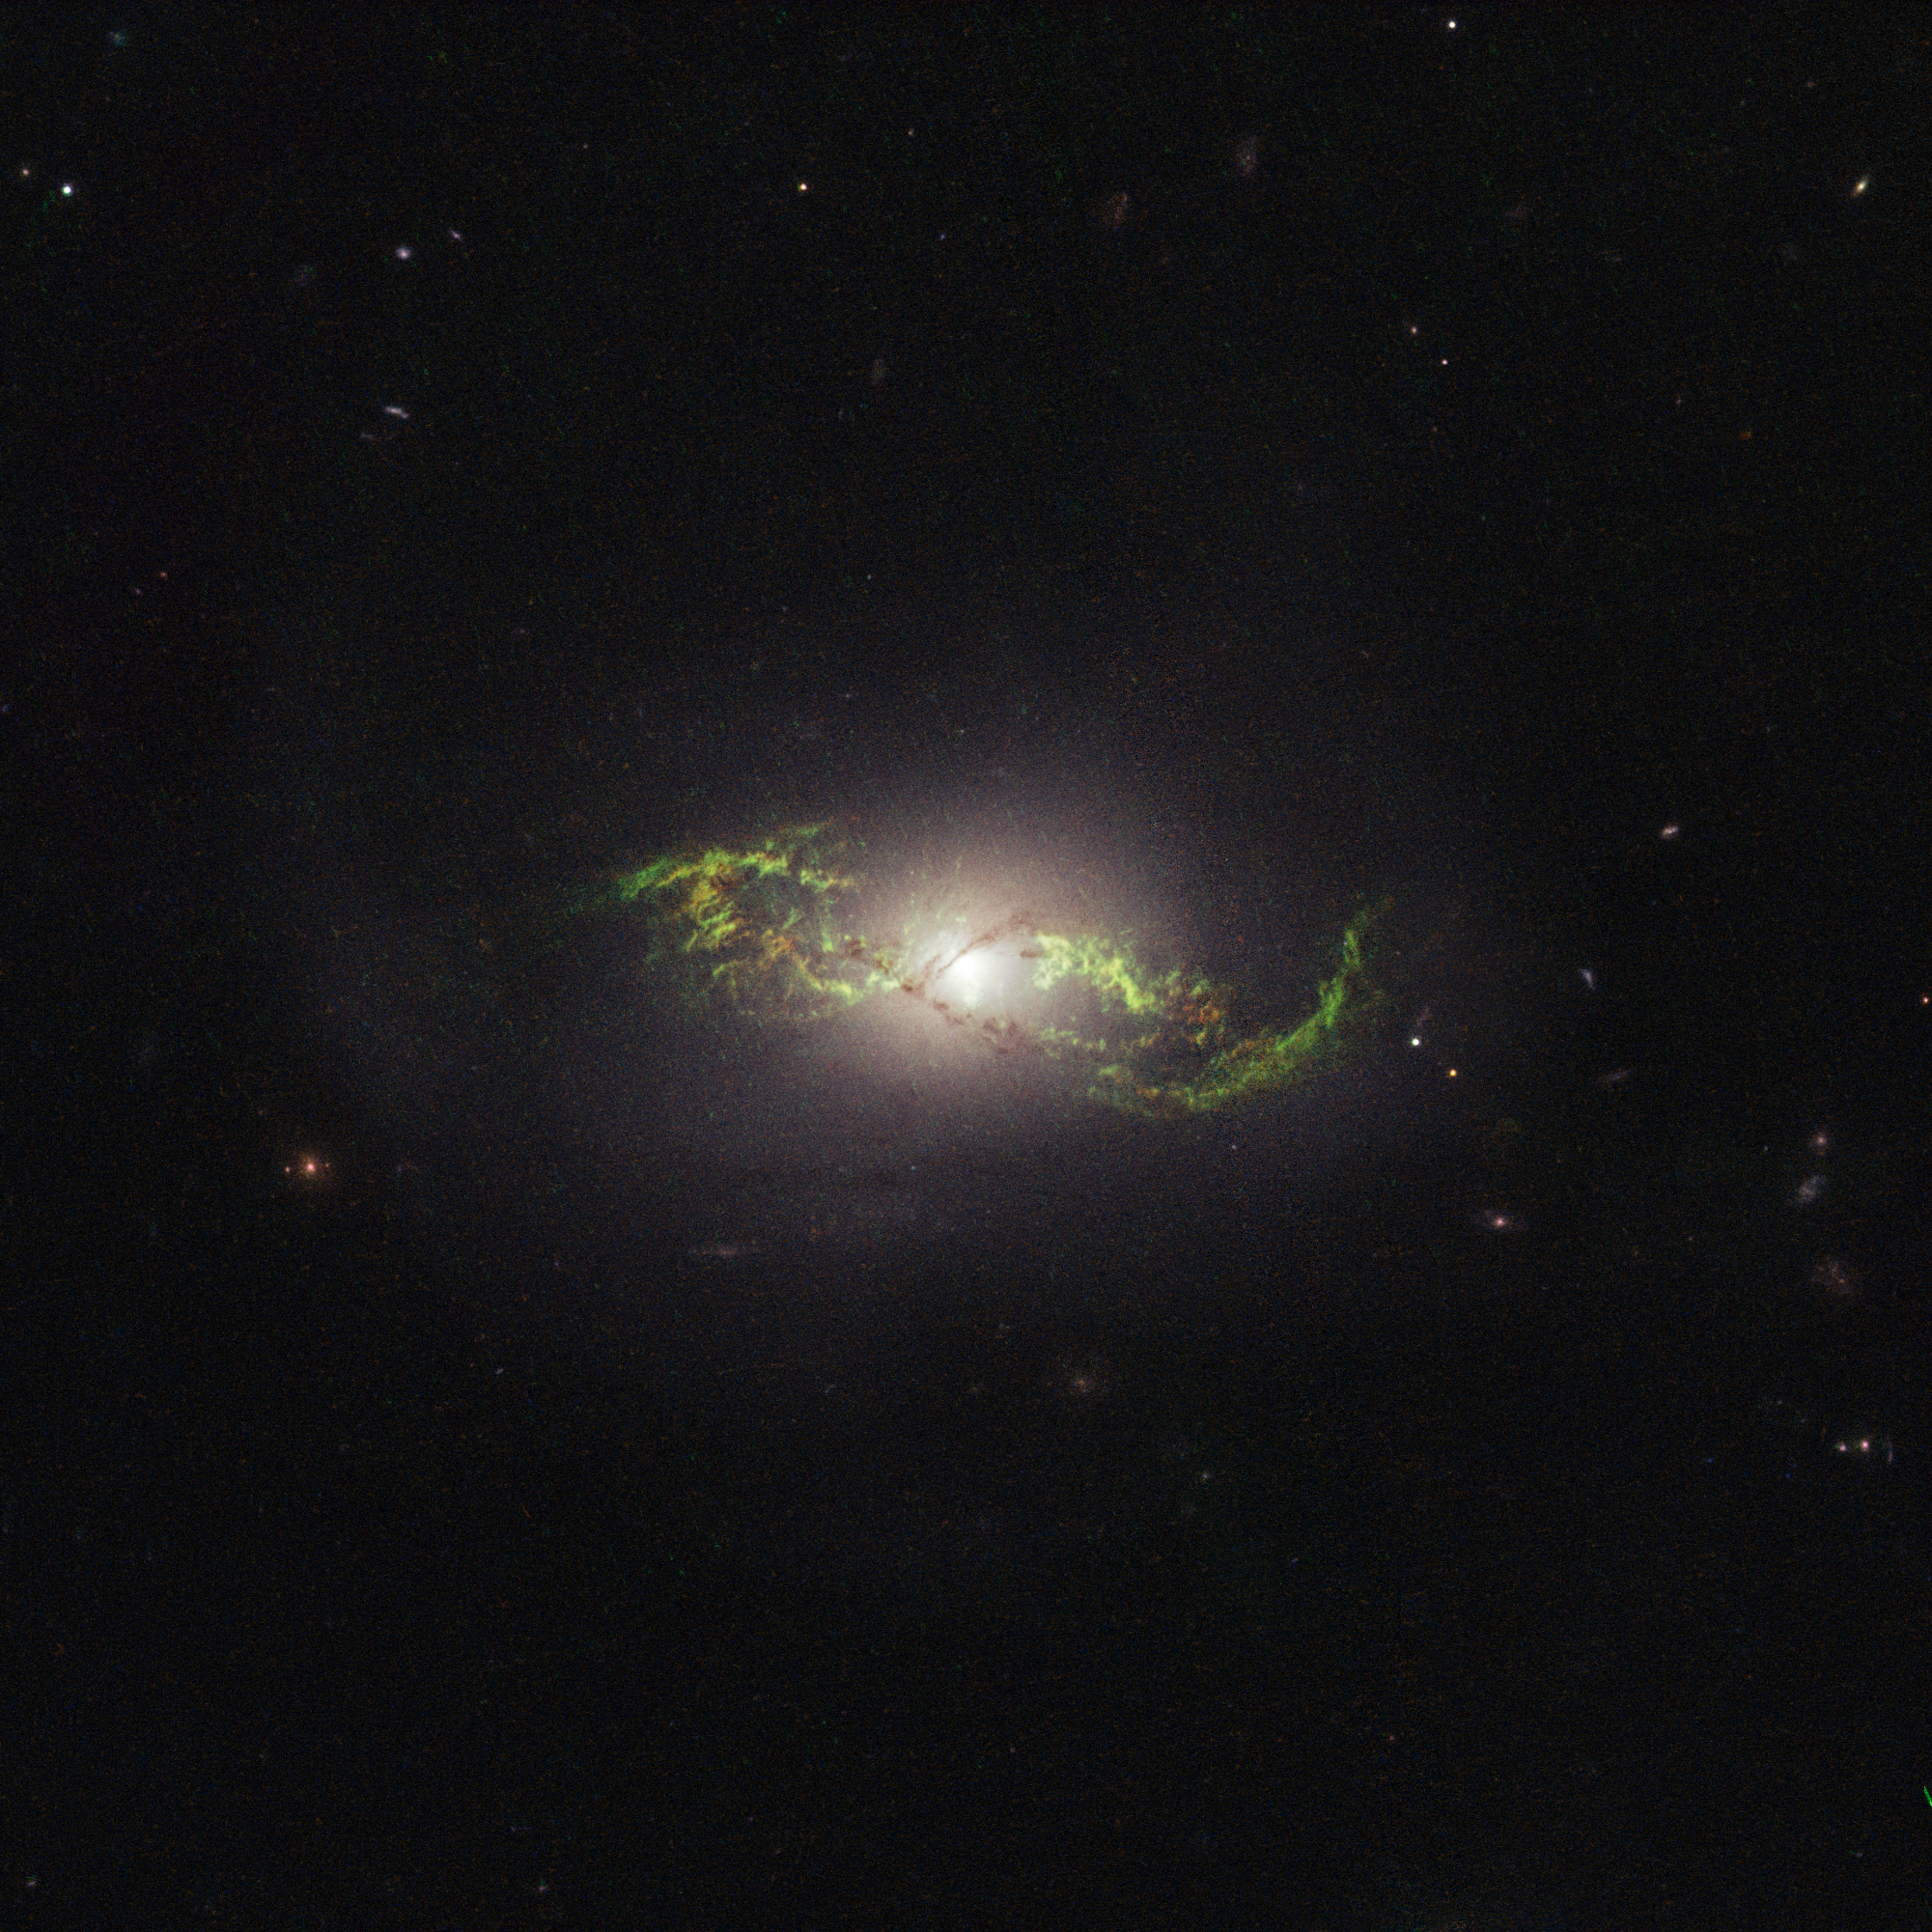

Hubble view of green filament in galaxy NGC 5972

Twisting in the darkness like a disturbed double helix, NGC 5972 exhibits a remarkable structure of ionised gas, which appears to be reeling in space as a result of a huge disturbance of some kind, possibly a merger with another galaxy.

The sweeping trails of gas — both H-alpha and doubly ionised Oxygen, which would both usually be expected in areas of star creation and destruction — reach out into space far beyond the stars that comprise the main body of the galaxy — so far, in fact, that when the Hubble Space Telescope applied the filter necessary to view the gas, it was unable to fit the entire extent of the clouds within its field of view, as seen in this original image.

Aside from its intriguing tendrils, NGC 5972 also plays host to an active galactic nucleus. This means a supermassive black hole resides at the centre of the galaxy, and the accretion disc around this monster’s genocidal jaws is rotated with such ferocity that twin beams of plasma are ejected in opposite directions out into the depths of space at close to the speed of light. Because of the vast sums of energy involved, this process can be imaged most effectively in the radio wavelengths, and doing so produces images of structures that are of indescribable magnitudes. Cygnus A provides perhaps the best illustration of this, as seen in this image taken by the NRAO Very Large Array, where the nucleus of the host galaxy appears as nothing more than an insignificant mote of dust, dwarfed by the jets and lobes of highly charged particles protruding outwards with spectacular flamboyance.

Credit: NASA, ESA, W. Keel (University of Alabama, USA)